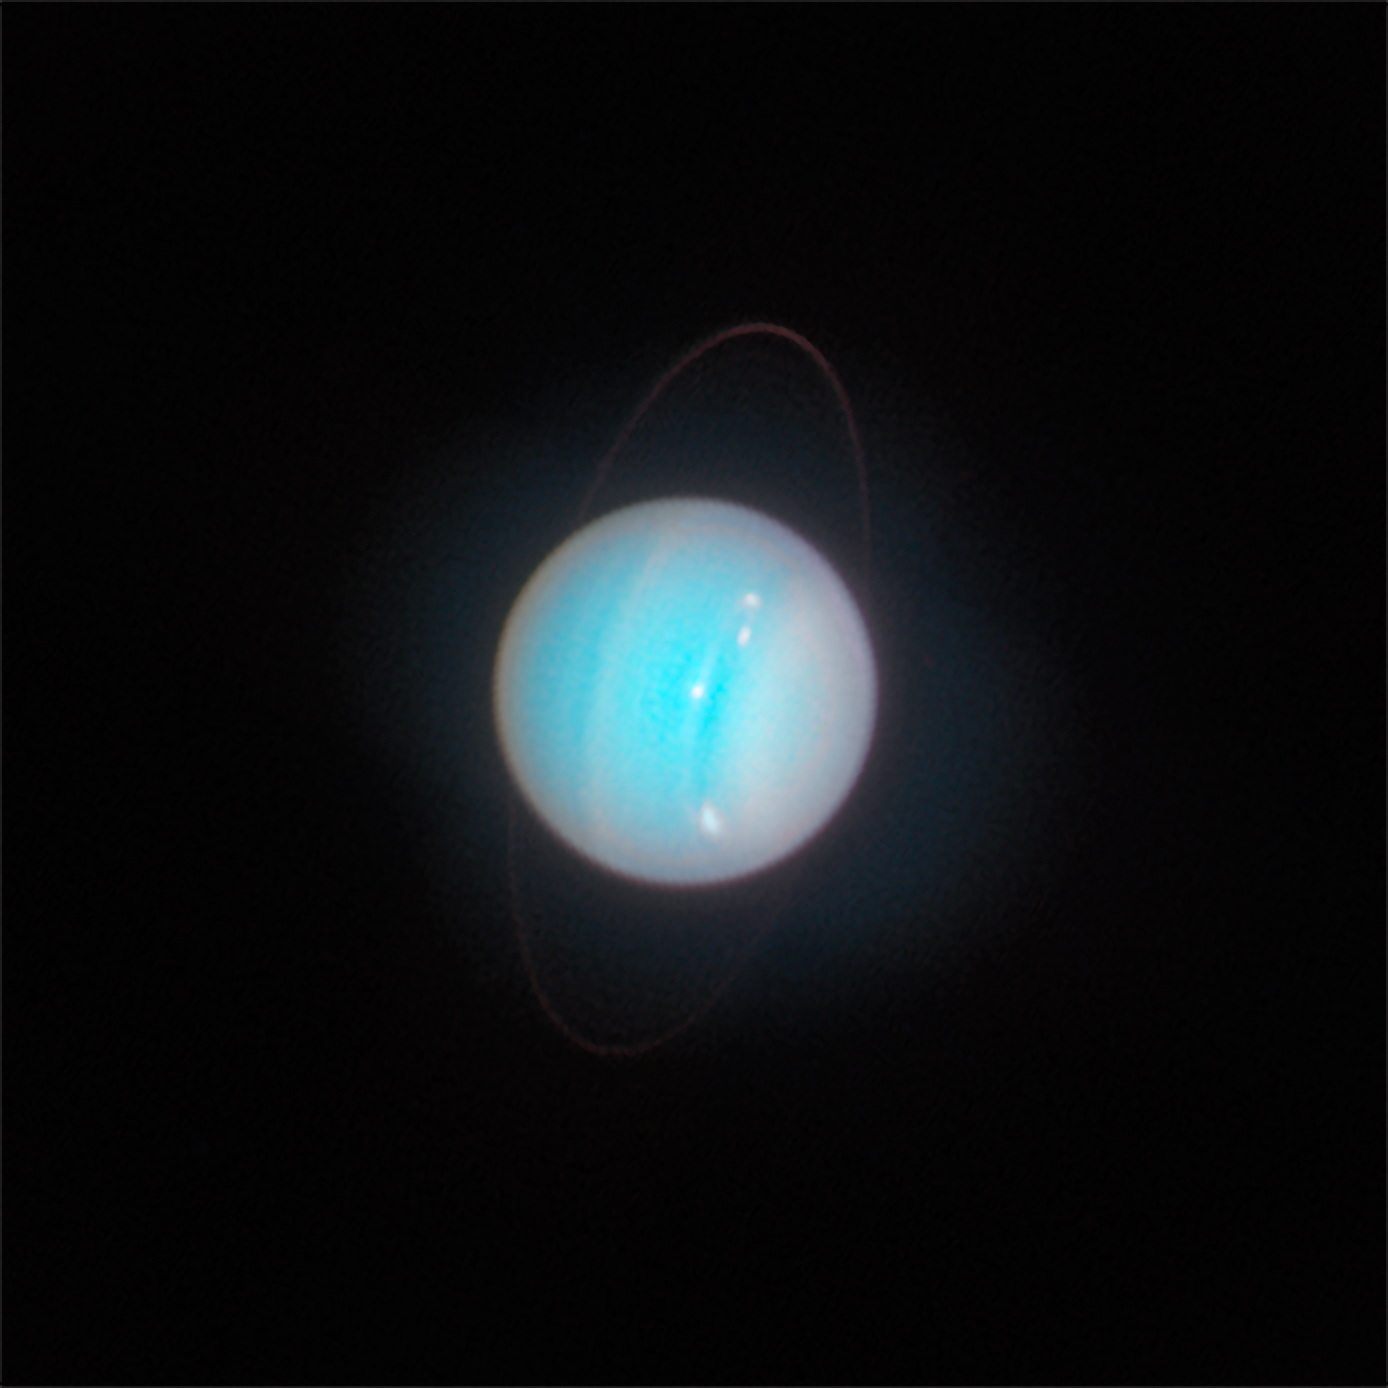

Uranus (November 2014)

This is a Hubble view of Uranus taken in 2014, seven years after the northern spring equinox when the Sun was shining directly over the planet’s equator, and shows one of the first images from the OPAL programme. Multiple storms with methane ice-crystal clouds appear at mid-northern latitudes above the planet’s cyan-tinted lower atmosphere. Hubble photographed the ring system edge-on in 2007, but the rings are seen starting to open up seven years later in this view. At this time, the planet had multiple small storms and even some faint cloud bands.

Credit: NASA, ESA, STScI, A. Simon (NASA-GSFC), M. H. Wong (UC Berkeley), J. DePasquale (STScI)